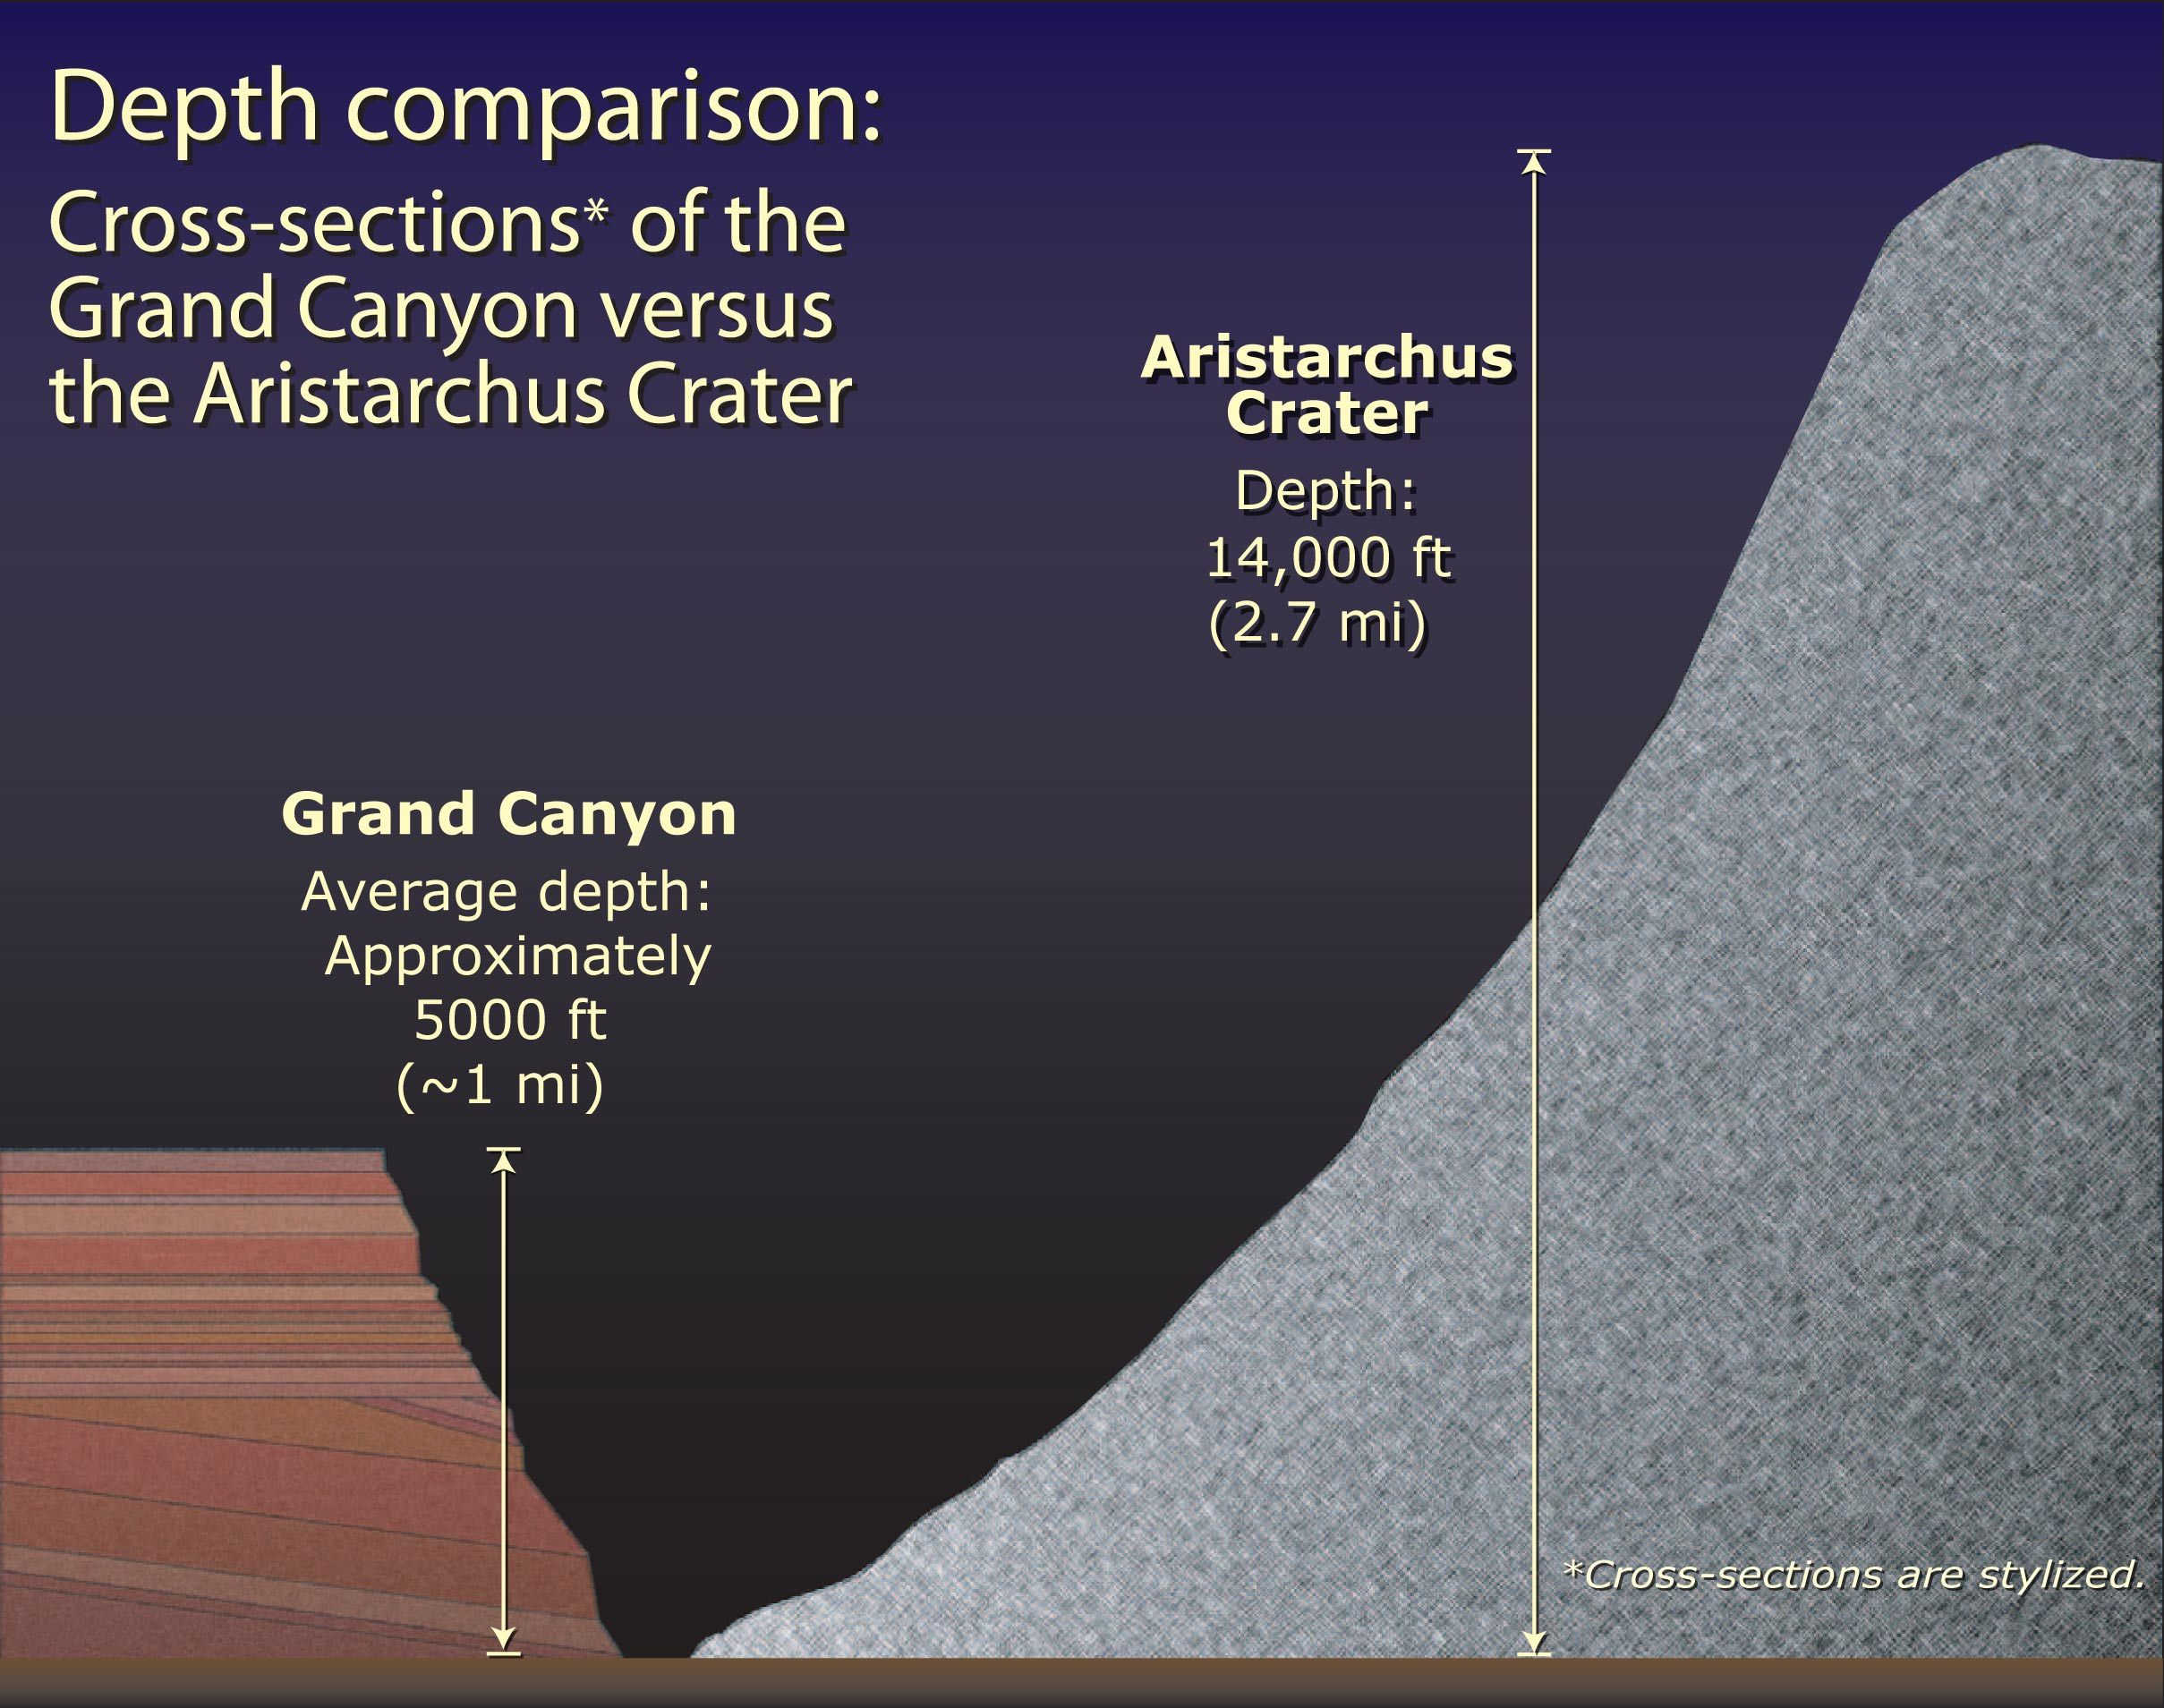

Aristarchus Depth Comparison

Depth Comparison of the Grand Canyon versus the Aristarchus Crater Aristarchus crater is almost three times as deep as the Grand Canyon.

Credit: NASA, ESA, and J. Garvin (NASA/GSFC)